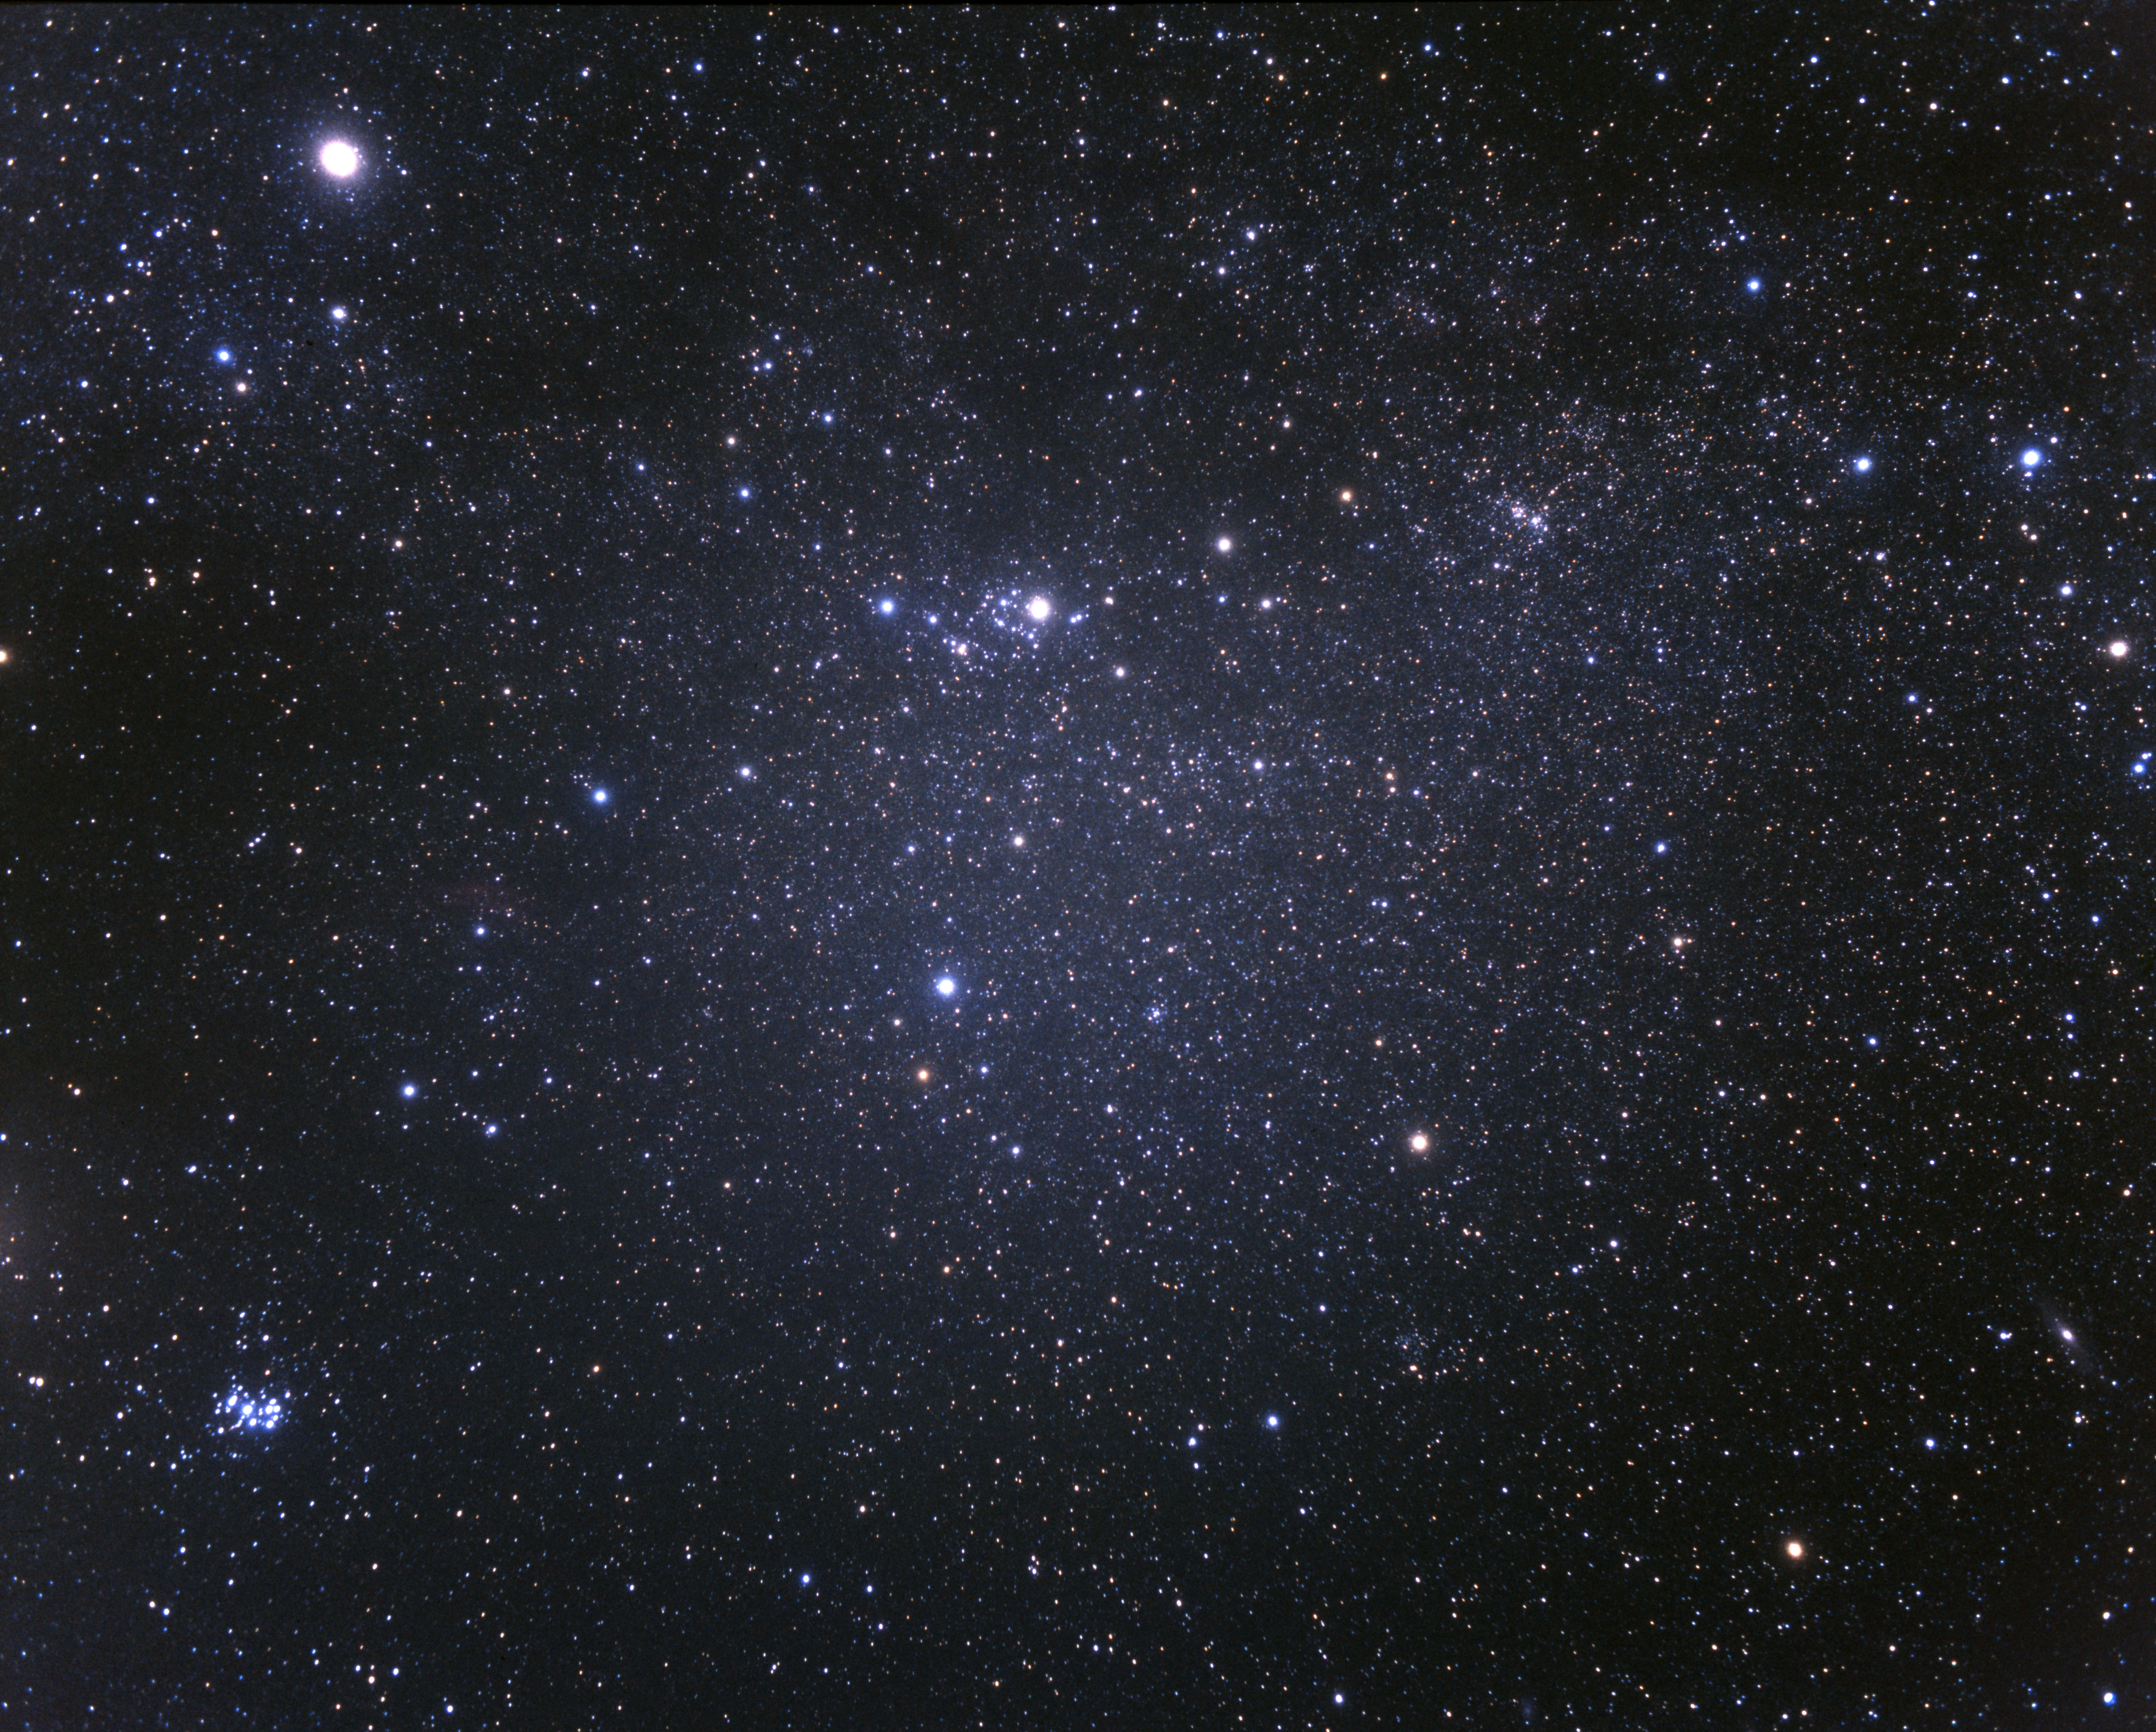

Wide-field view of the Perseus constellation (ground-based image)

The Perseus Cluster and erupting galaxy NGC 1275 are found within the constellation Perseus, the Hero. Although NGC 1275 is the brightest galaxy in the Perseus Galaxy Cluster, professional equipment is required to see it in any detail. However, even naked eye observers can see the Pleiades open star cluster in neighbouring Taurus (in the bottom left of the image) on a clear night.

Credit: A. Fujii